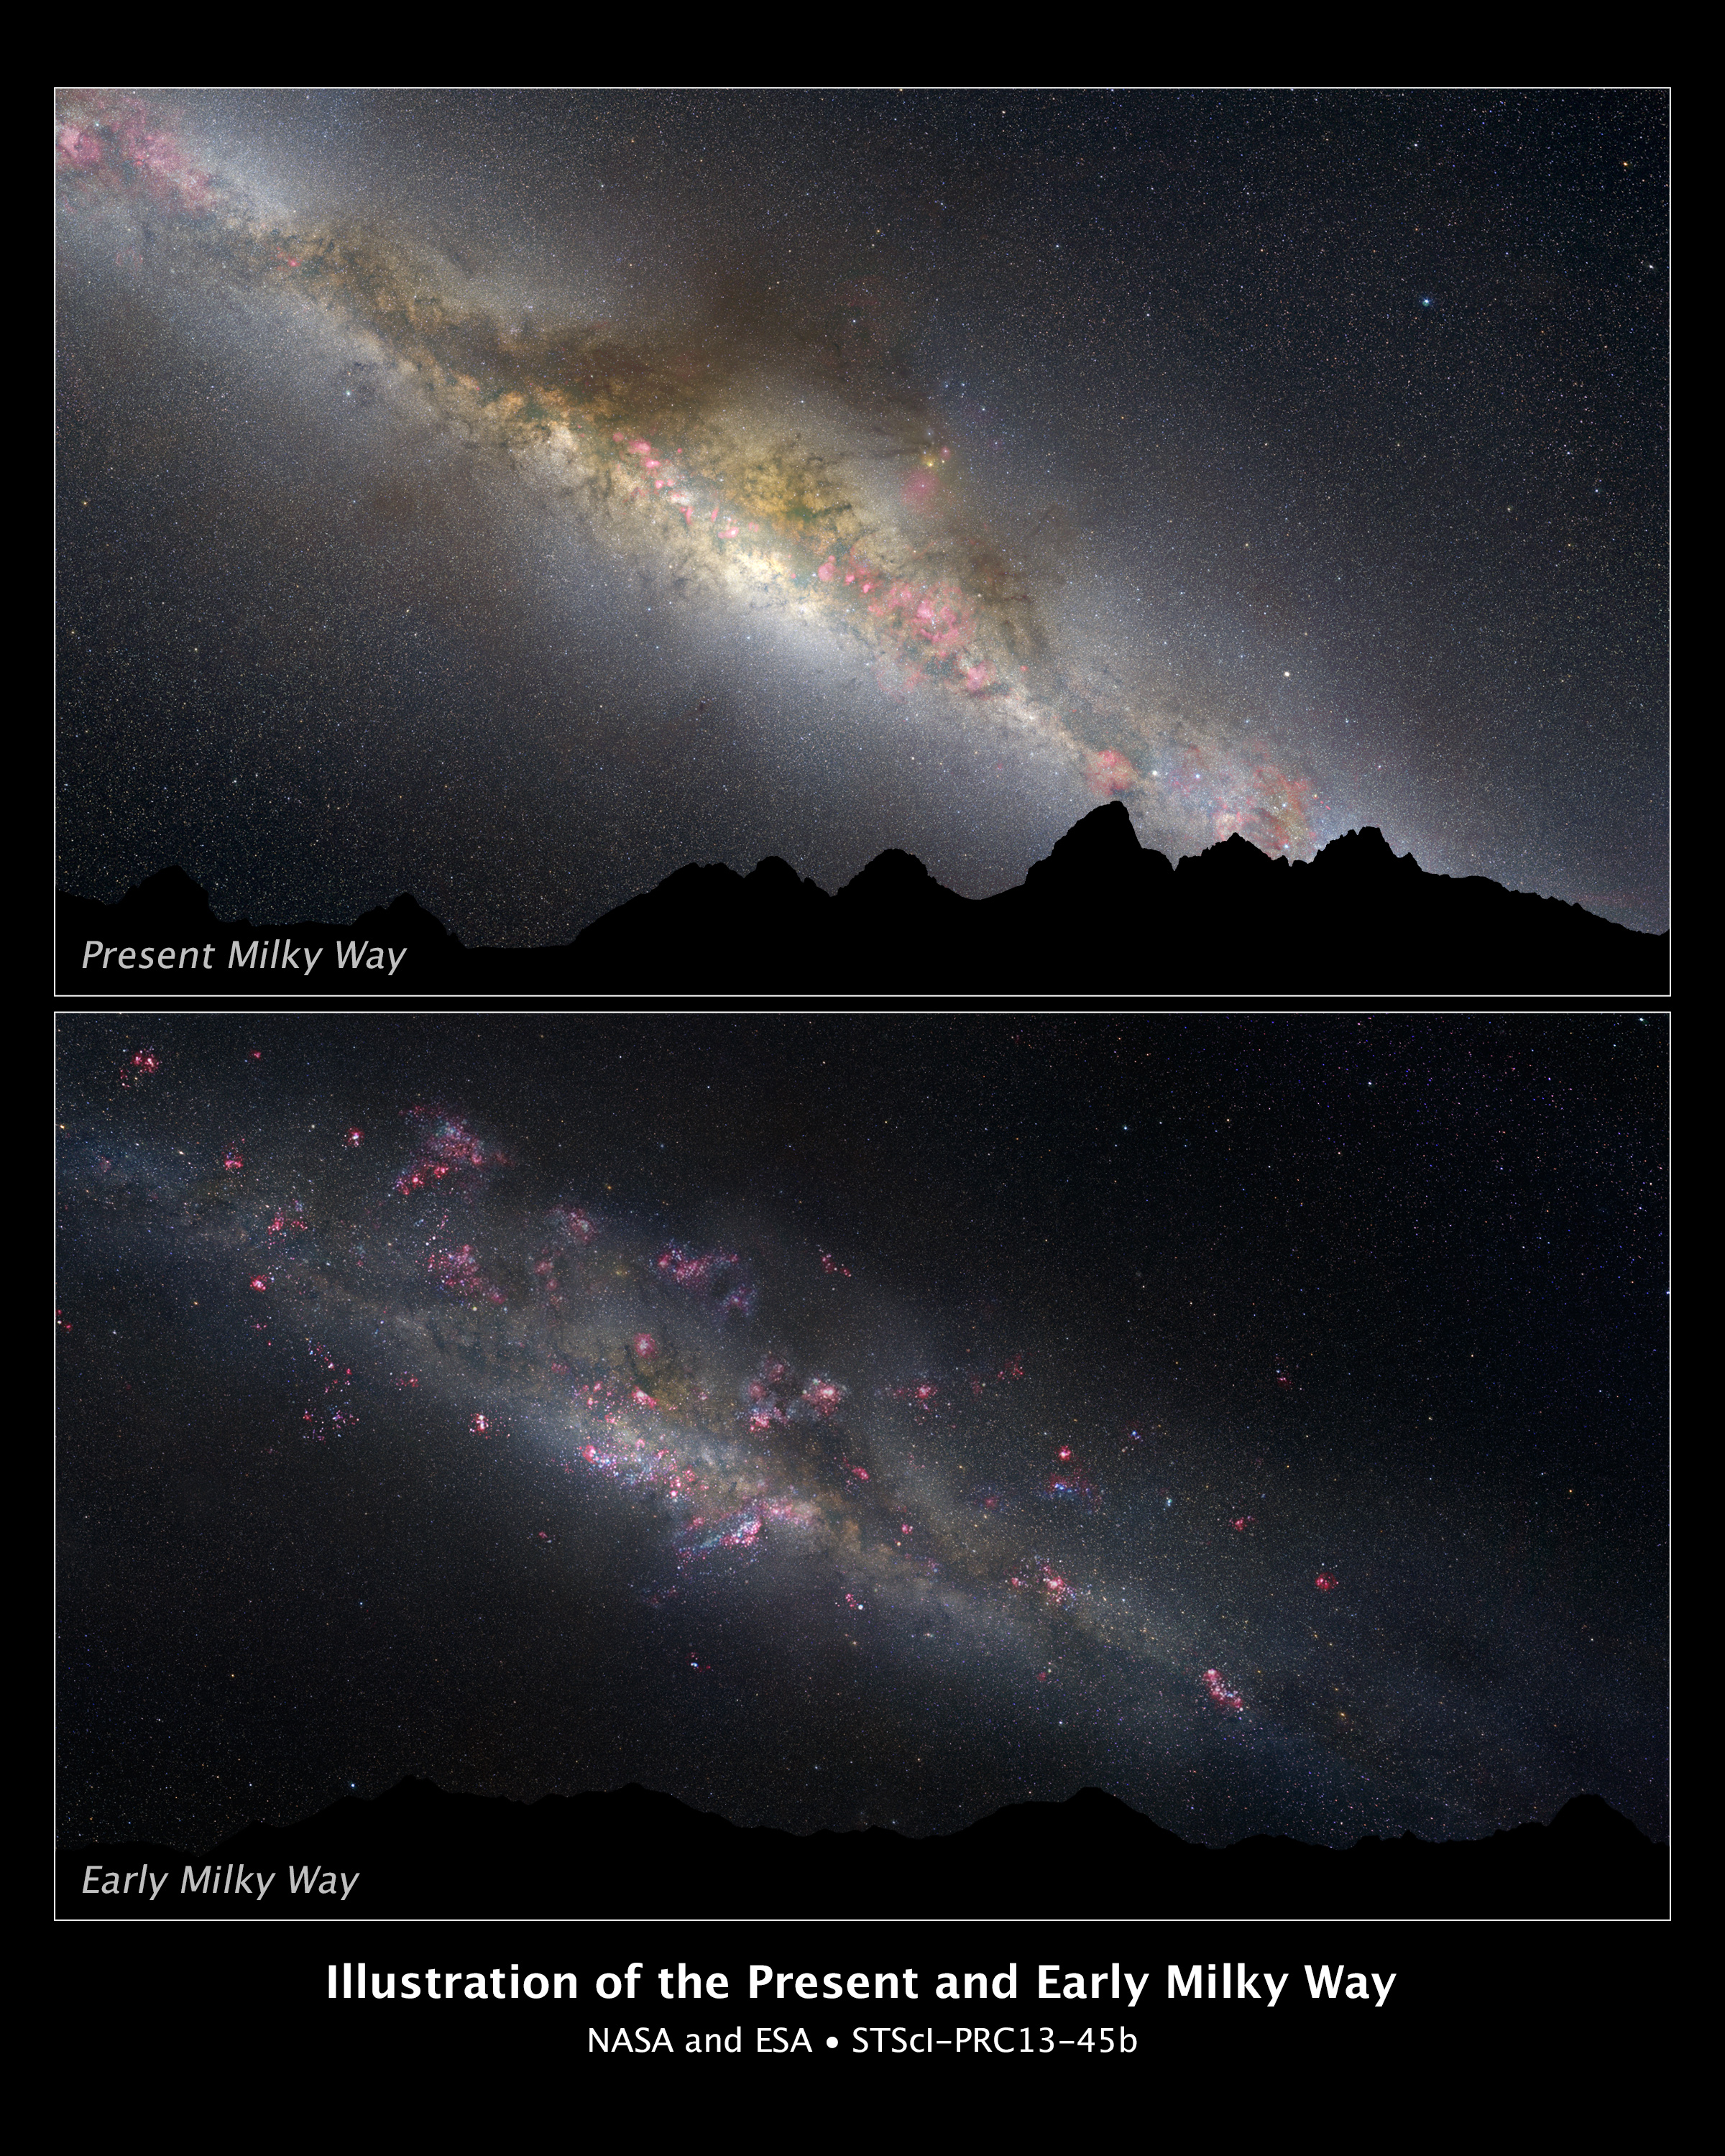

The present and early Milky Way (artist’s illustration)

What a difference 11 billion years makes, as can be seen in these two comparative views of our Milky Way galaxy. The top view shows how our galaxy looks today. The bottom view shows how it appeared in the remote past. This photo illustration is based on a NASA/ESA Hubble Space Telescope survey of evolving Milky Way-type galaxies.

In the top view, the current night sky is dominated by the white glow of myriad middle-aged stars along the lane of the Milky Way. Interstellar "pollution" from thick dust lanes can be seen threading through the long band of stars. They are interspersed with a few pinkish emission nebulae from ongoing star formation. Thousands of stars appear as pinpricks of light throughout the sky.

The bottom view shows an imaginary view of our young Milky Way as it may have appeared 11 billion years ago, as seen from the surface of a hypothetical planet. The night sky looks markedly different than the view today. The Milky Way's disc and central bulge of stars are smaller and dimmer because the galaxy is in an early phase of construction. The heavens are ablaze with a firestorm of new star formation, seen in the pinkish nebulae glowing from stars still wrapped inside their natal cocoons. The handful of stars visible in the night sky are blue and bright because they are young.

The graphic of today's Milky Way was based on an all-sky image from Axel Mellinger and the Finkbeiner all-sky H-alpha survey. The illustration of the early Milky Way was constructed from the all-sky image from Axel Mellinger and Robert Gendler's image of the M33 galaxy.

Credit: NASA, ESA, and Z. Levay (STScI/AURA)